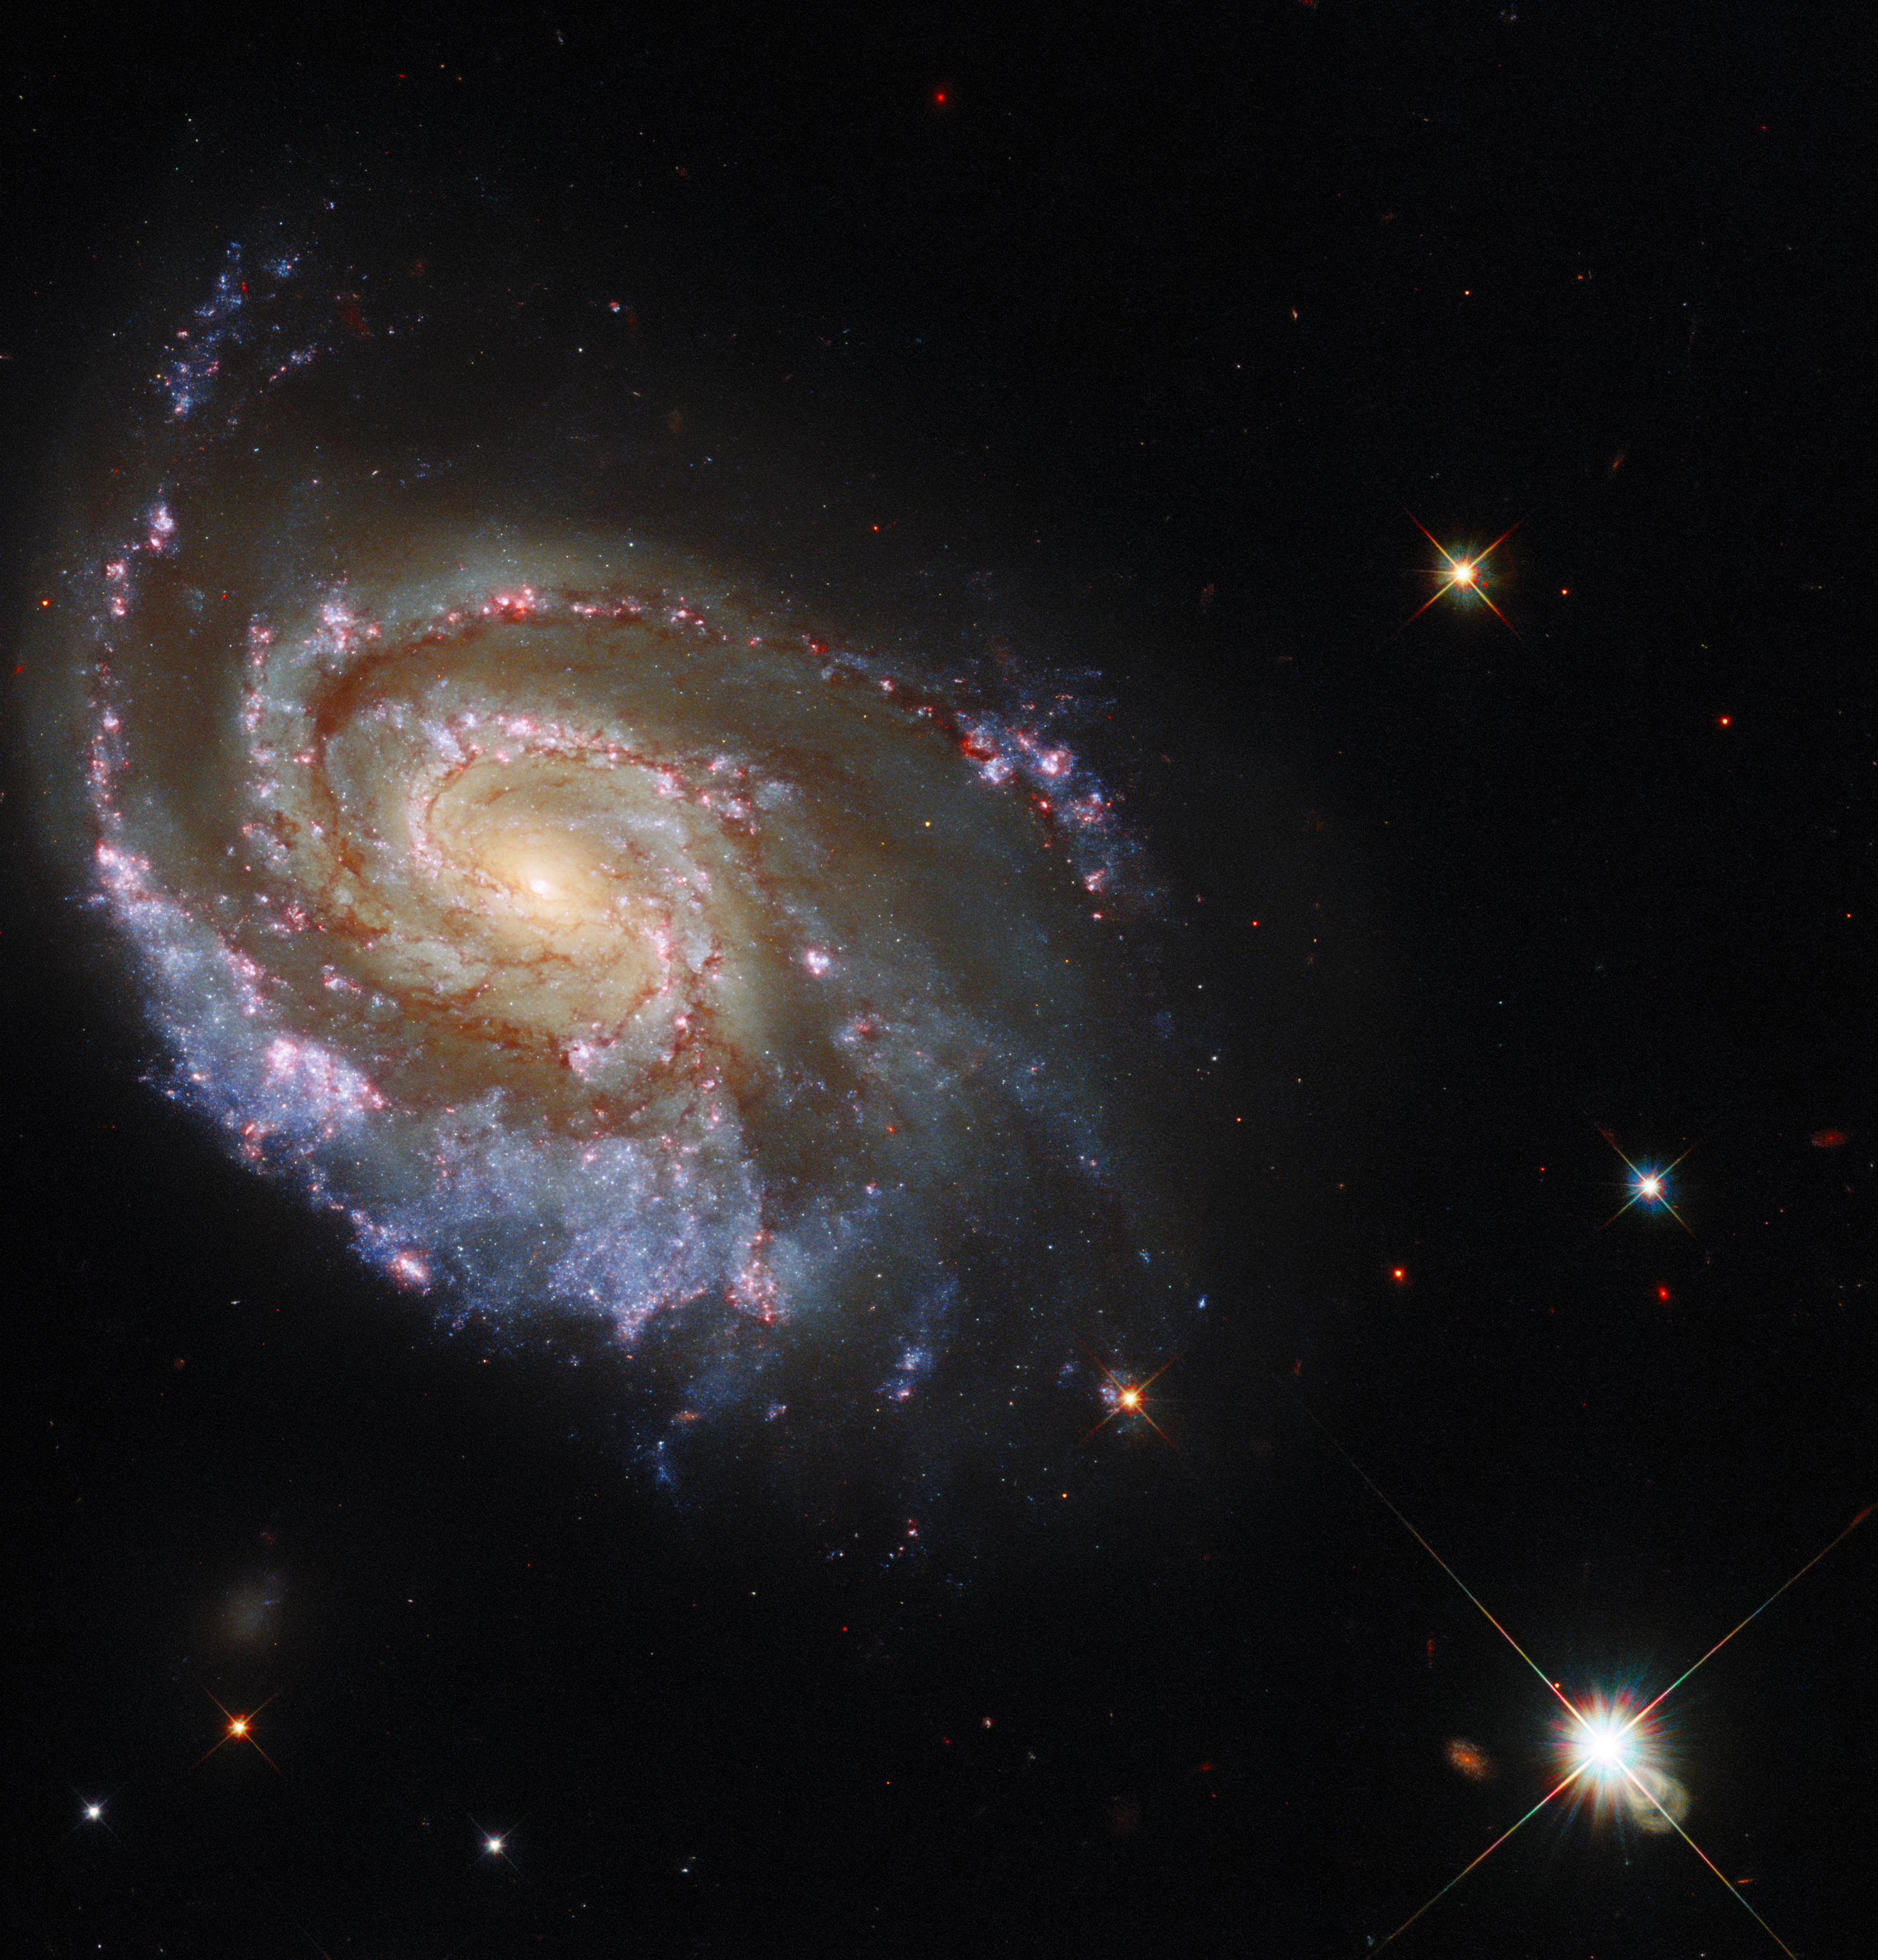

Cosmic Fireworks

This NASA/ESA Hubble Space Telescope Picture of the Week features the galaxy NGC 6984, an elegant spiral galaxy in the constellation Indus roughly 200 million light-years away from Earth. The galaxy is a familiar sight for Hubble, having already been captured in 2013. The sweeping spiral arms are threaded through with a delicate tracery of dark lanes of gas and dust, and studded with bright stars and luminous star-forming regions.

These new observations were made following an extremely rare astronomical event — a double supernova in NGC 6984. Supernovae are unimaginably violent explosions on a truly vast scale, precipitated by the deaths of massive stars. These events are powerful but rare and fleeting — a single supernova can outshine its host galaxy for a brief time. The discovery of two supernovae at virtually the same time and location (in astronomical terms) prompted speculation from astronomers that the two supernovae may somehow be physically linked. Using optical and ultraviolet observations from Hubble’s Wide Field Camera 3, astronomers sought to get a better look at the site of the two supernovae, hopefully allowing them to discover if the two supernova explosions were indeed linked. Their findings could give astronomers important clues into the lives of binary stars.

As well as helping to unravel an astronomical mystery, these new observations added more data to the 2013 observations, and allowed this striking new image to be created. The observations — each of which covers only a narrow range of wavelengths — add new details and a greater range of colours to the image.

Credit: ESA/Hubble & NASA, D. Milisavljevic